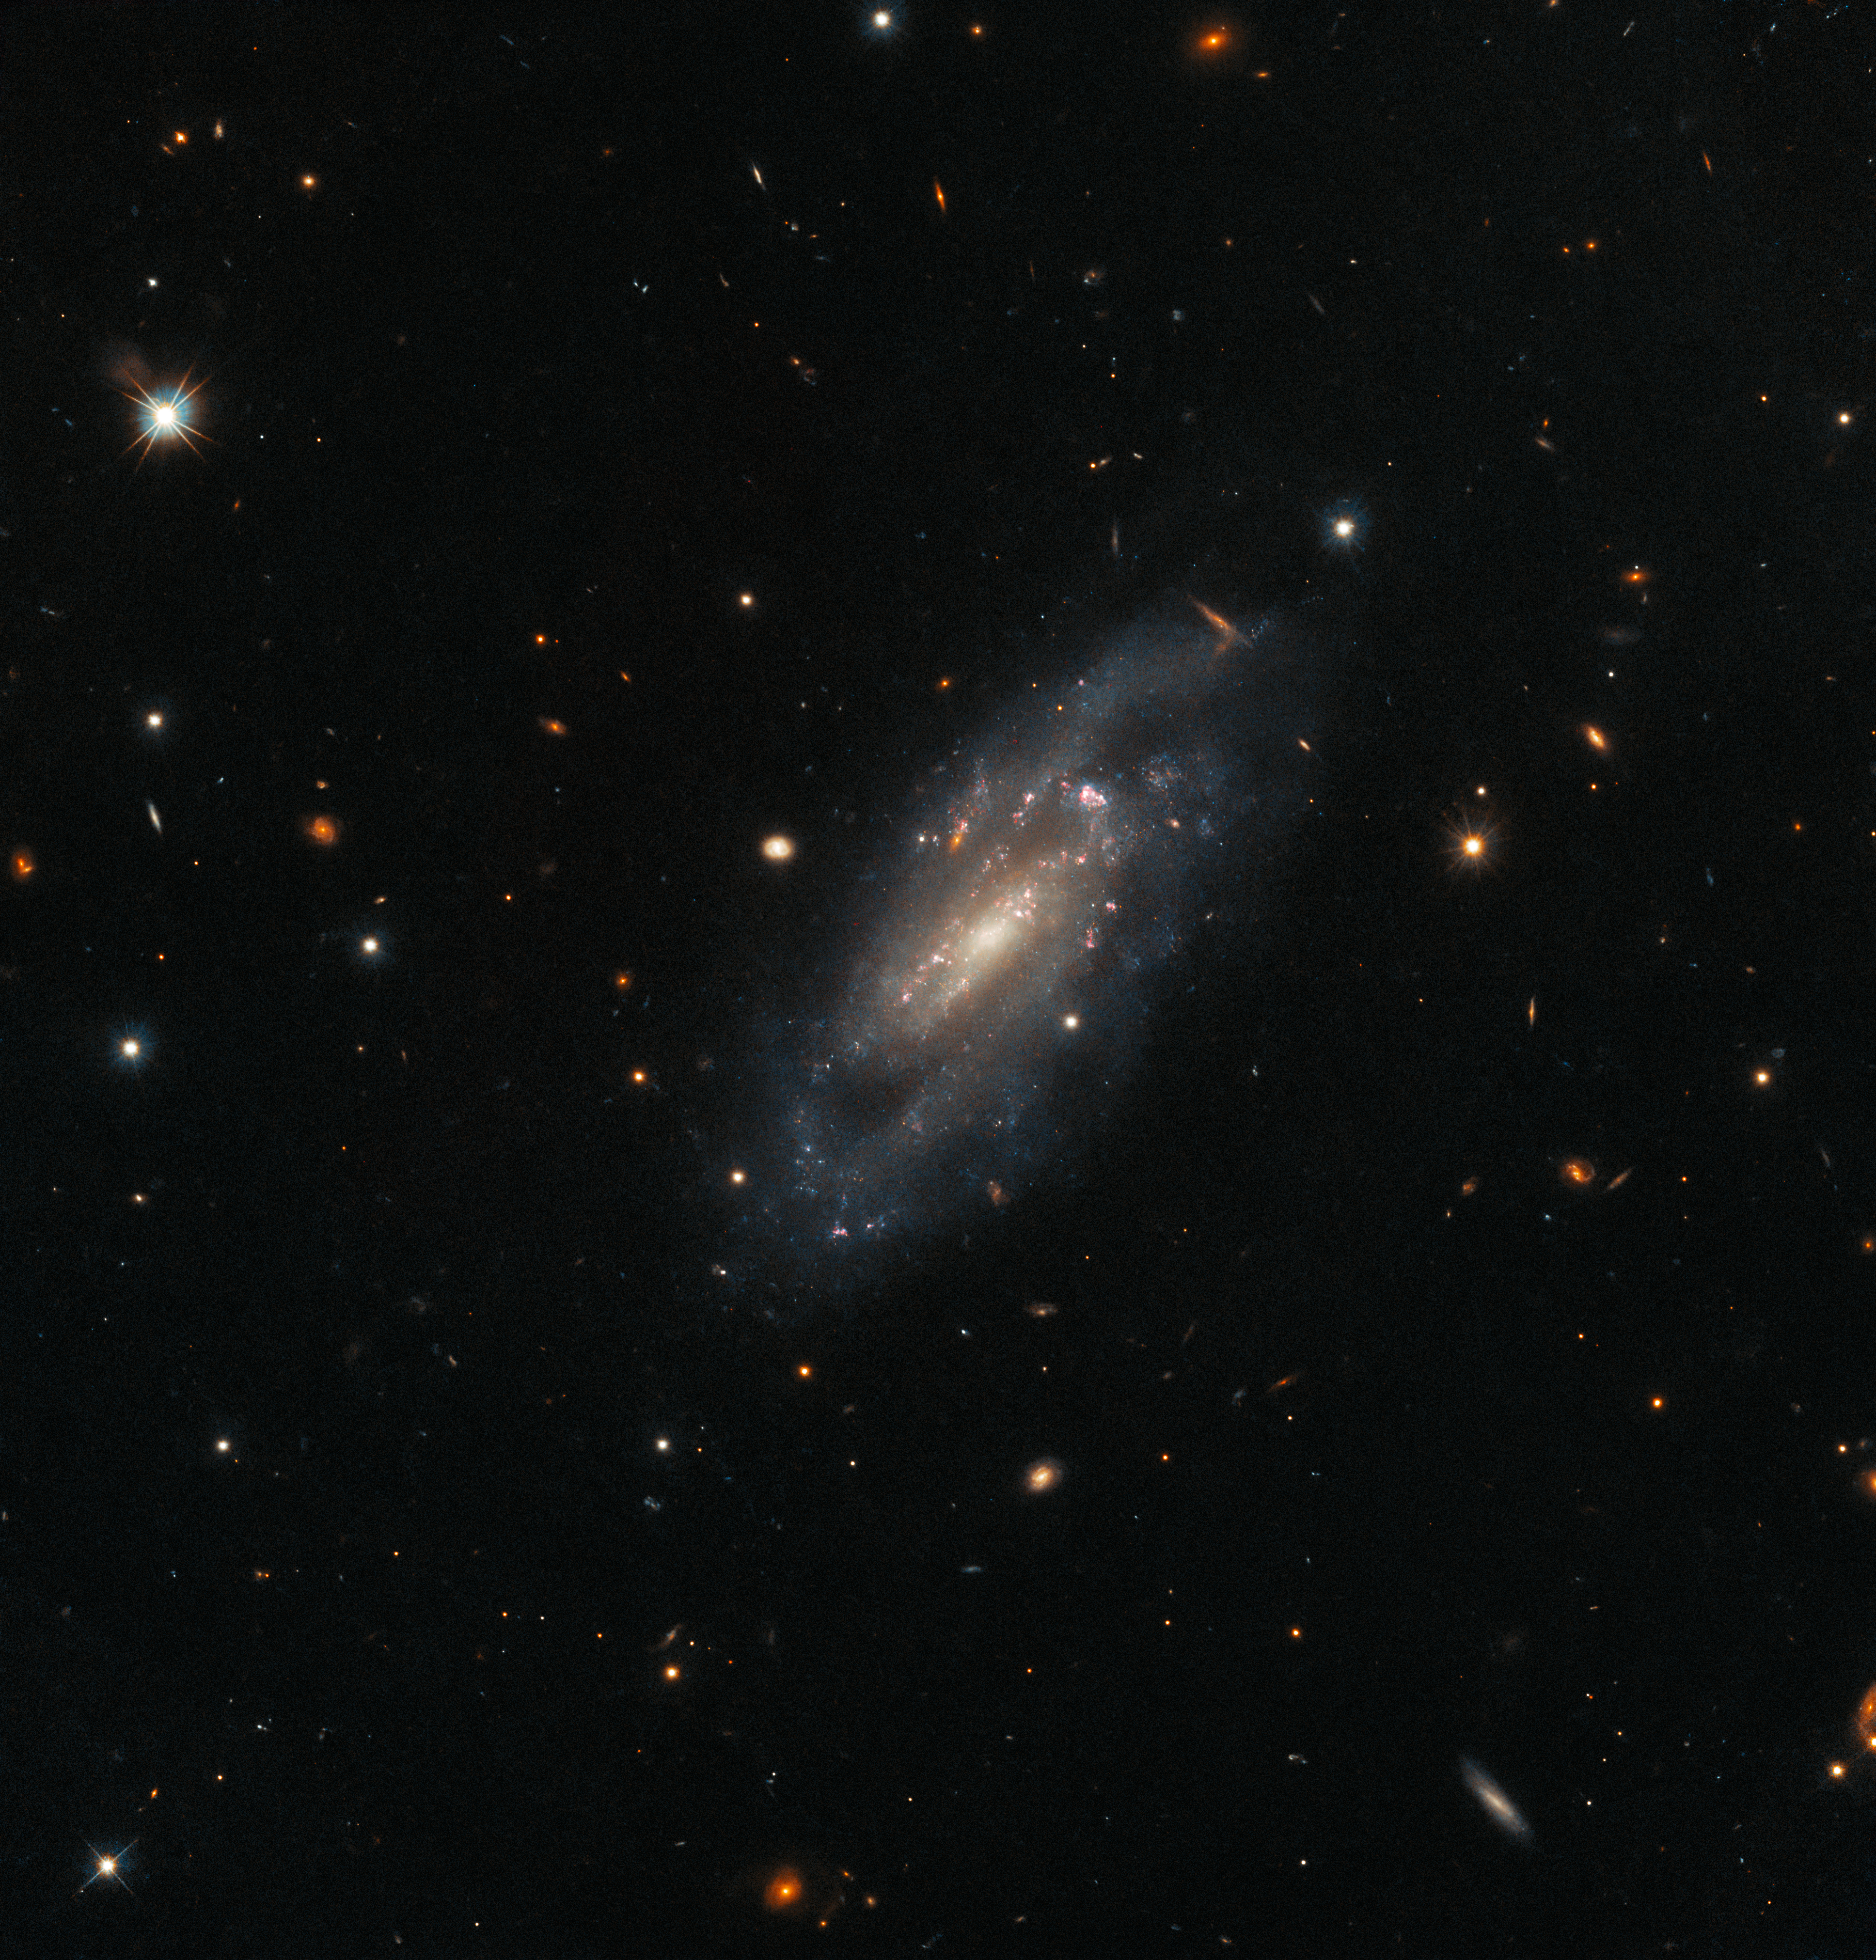

Serene Supernova Aftermath

The spiral galaxy UGC 11860 seems to float serenely against a field of background galaxies in this image from the NASA/ESA Hubble Space Telescope. UGC 11860 lies around 184 million light-years away in the constellation Pegasus, and its untroubled appearance is deceiving; this galaxy recently played host to an almost unimaginably energetic stellar explosion.

A supernova explosion — the catastrophically violent end of a massive star’s life — was detected in UGC 11860 in 2014 by a robotic telescope dedicated to scouring the skies for transient astronomical phenomena — astronomical objects that are only visible for a short period of time. Two different teams of astronomers used Hubble’s Wide Field Camera 3 to search through the aftermath and unpick the lingering remnants of this vast cosmic explosion.

One team explored UGC 11860 to understand more about the progenitor star systems that eventually meet their demise in supernovae. The hugely energetic processes during supernova explosions are predominantly responsible for forging the elements between silicon and nickel on the periodic table. This means that understanding the influence of the masses and compositions of the progenitor star systems is vital to explaining how many of the chemical elements here on Earth originated.

The other group of astronomers used Hubble to follow up supernovae that were detected by robotic telescopes. These automated eyes on the sky function without human intervention, and capture transient events in the night sky. Robotic telescopes allow astronomers to detect everything from unexpected asteroids to rare, unpredictable supernovae, and can identify intriguing objects that can then be investigated in more detail by powerful telescopes such as Hubble.

Credit: ESA/Hubble & NASA, A. Filippenko, J. D. Lyman